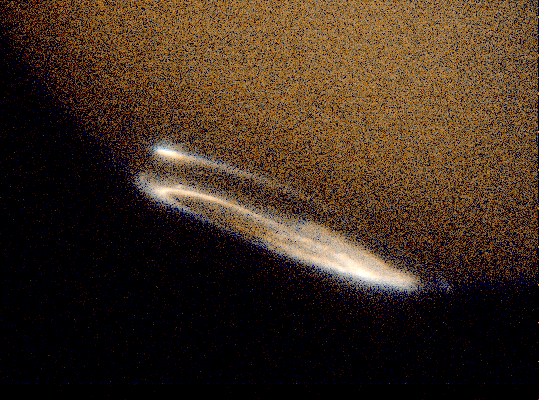

Hubble Provides Complete View of Jupiter's Auroras

Images taken in ultraviolet light by the Space Telescope Imaging Spectrograph (STIS) show both auroras, the oval- shaped objects in the inset photos. While the Hubble telescope has obtained images of Jupiter's northern and southern lights since 1990, the new STIS instrument is 10 times more sensitive than earlier cameras.

Credit: John Clarke (University of Michigan), and NASA/ESA